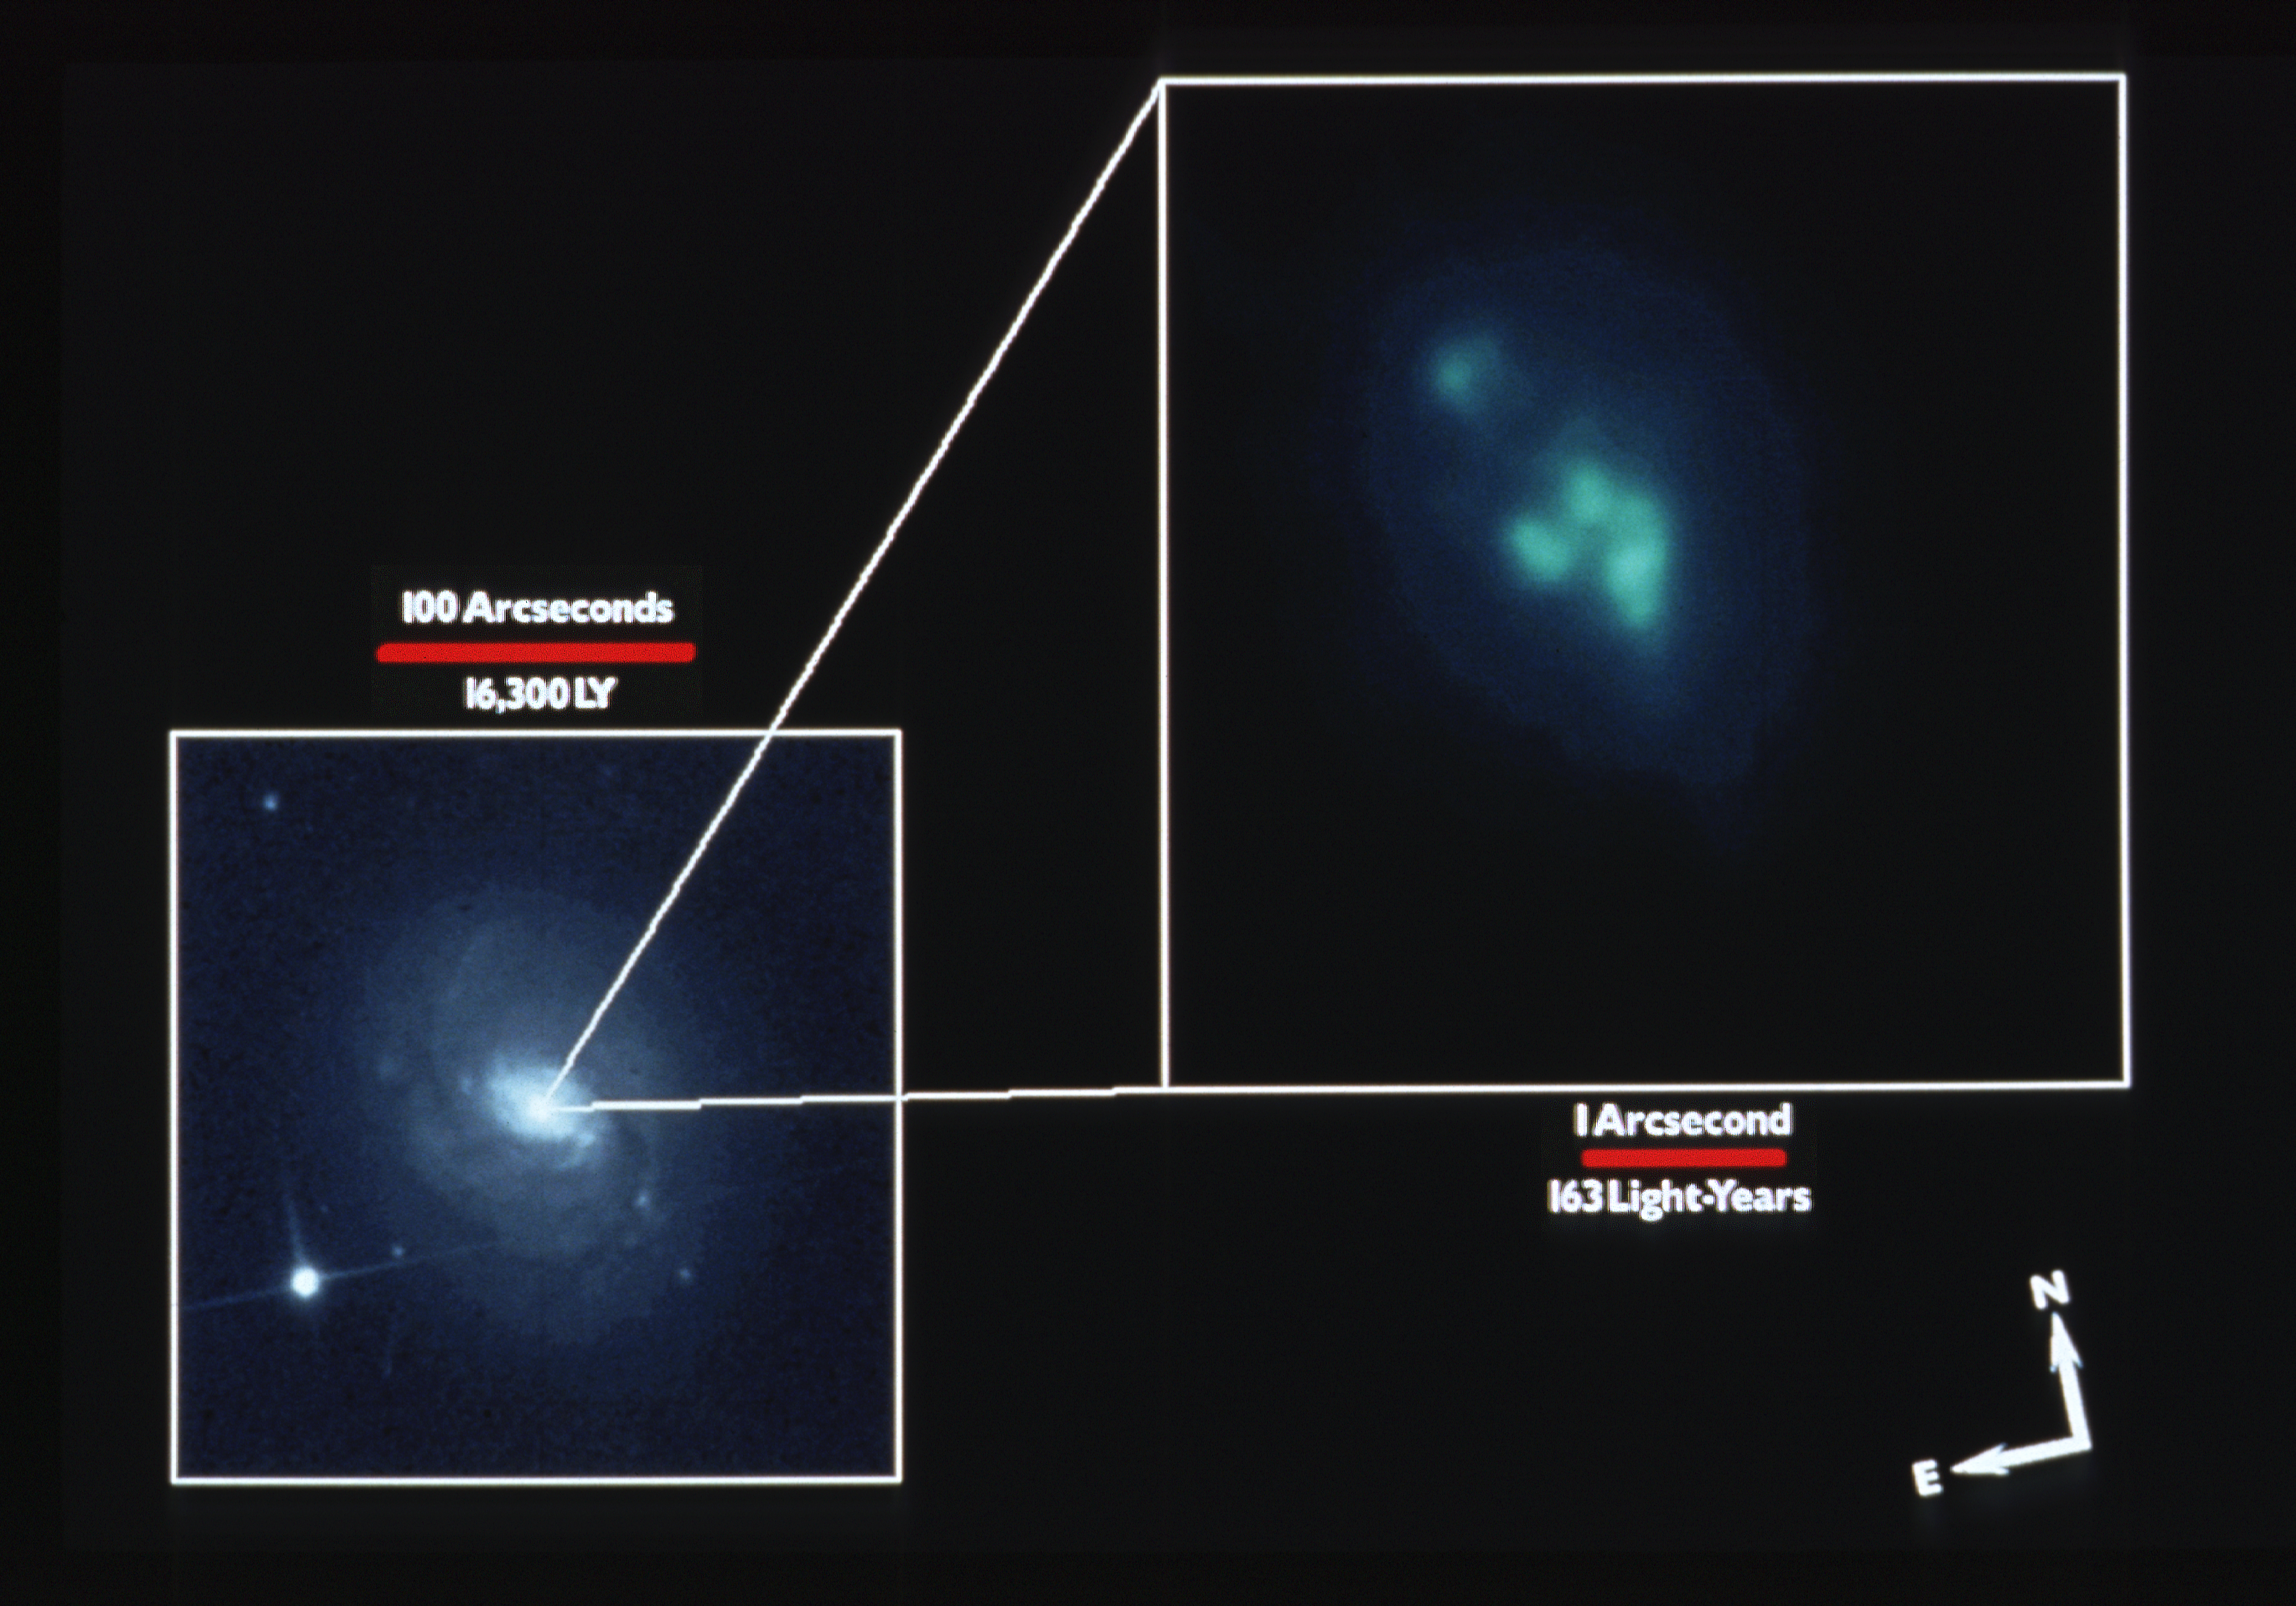

NGC 1068 & nuclear region - wide field and planetary camera

A picture of the barred spiral galaxy NGC 1068, taken with the 0.9-m telescope at Kitt Peak National observatory shows the bright nucleus. The inset is an HST WFPC narrow band image which shows clouds of ionized gas in the very center of the galaxy.

Credit: KPNO and NASA/ESA